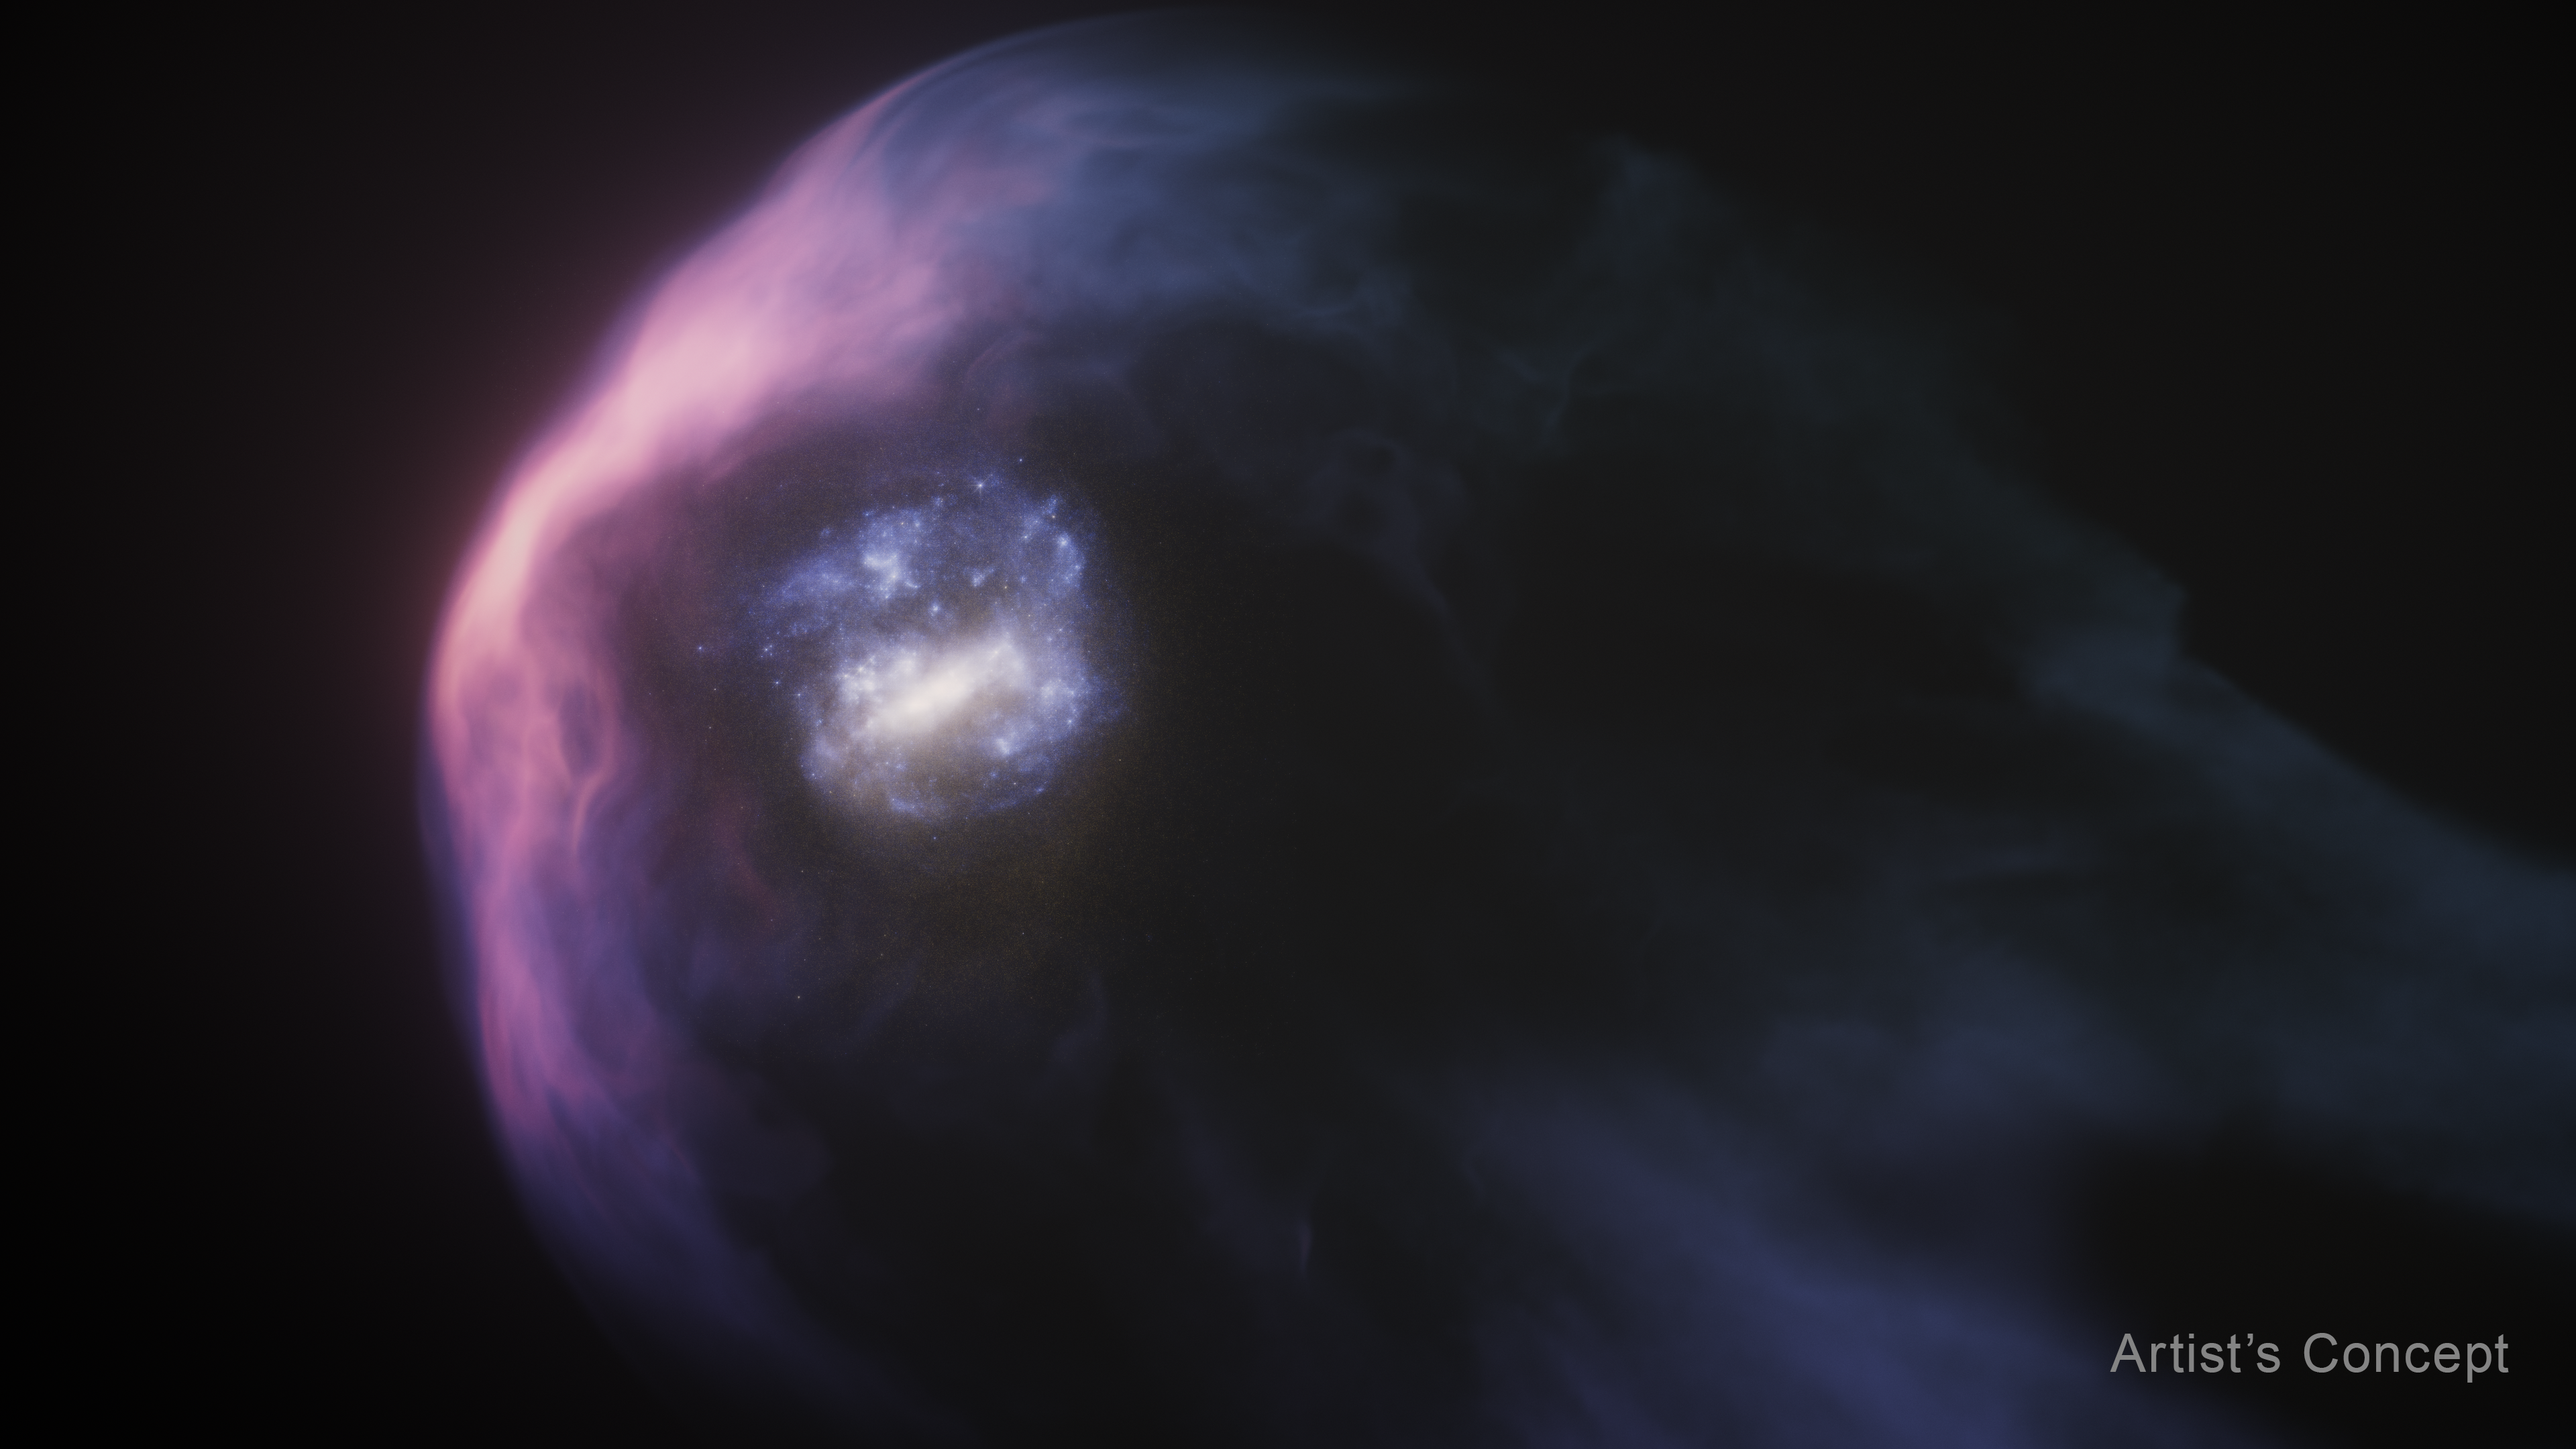

Closeup of the LMC and its halo (artist’s concept)

This artist’s concept shows a closeup of the Large Magellanic Cloud (LMC), a dwarf galaxy that is one of the Milky Way galaxy’s nearest neighbours. Scientists think that the LMC has just completed its closest approach to the much more massive Milky Way. This encounter has blown away most of the spherical halo of gas that surrounds the LMC. The bright purple bow shocks represent the leading edge of the LMC’s halo, which is being compressed as the Milky Way’s halo pushes back against the incoming LMC. The pressure is stripping much of the LMC’s halo and blowing it backward into a streaming tail of gas. The dwarf galaxy is cocooned within its remaining halo. An actual science image of the LMC is combined with an artist’s rendering of the galaxy’s halo.

Credit: NASA, ESA, R. Crawford (STScI)